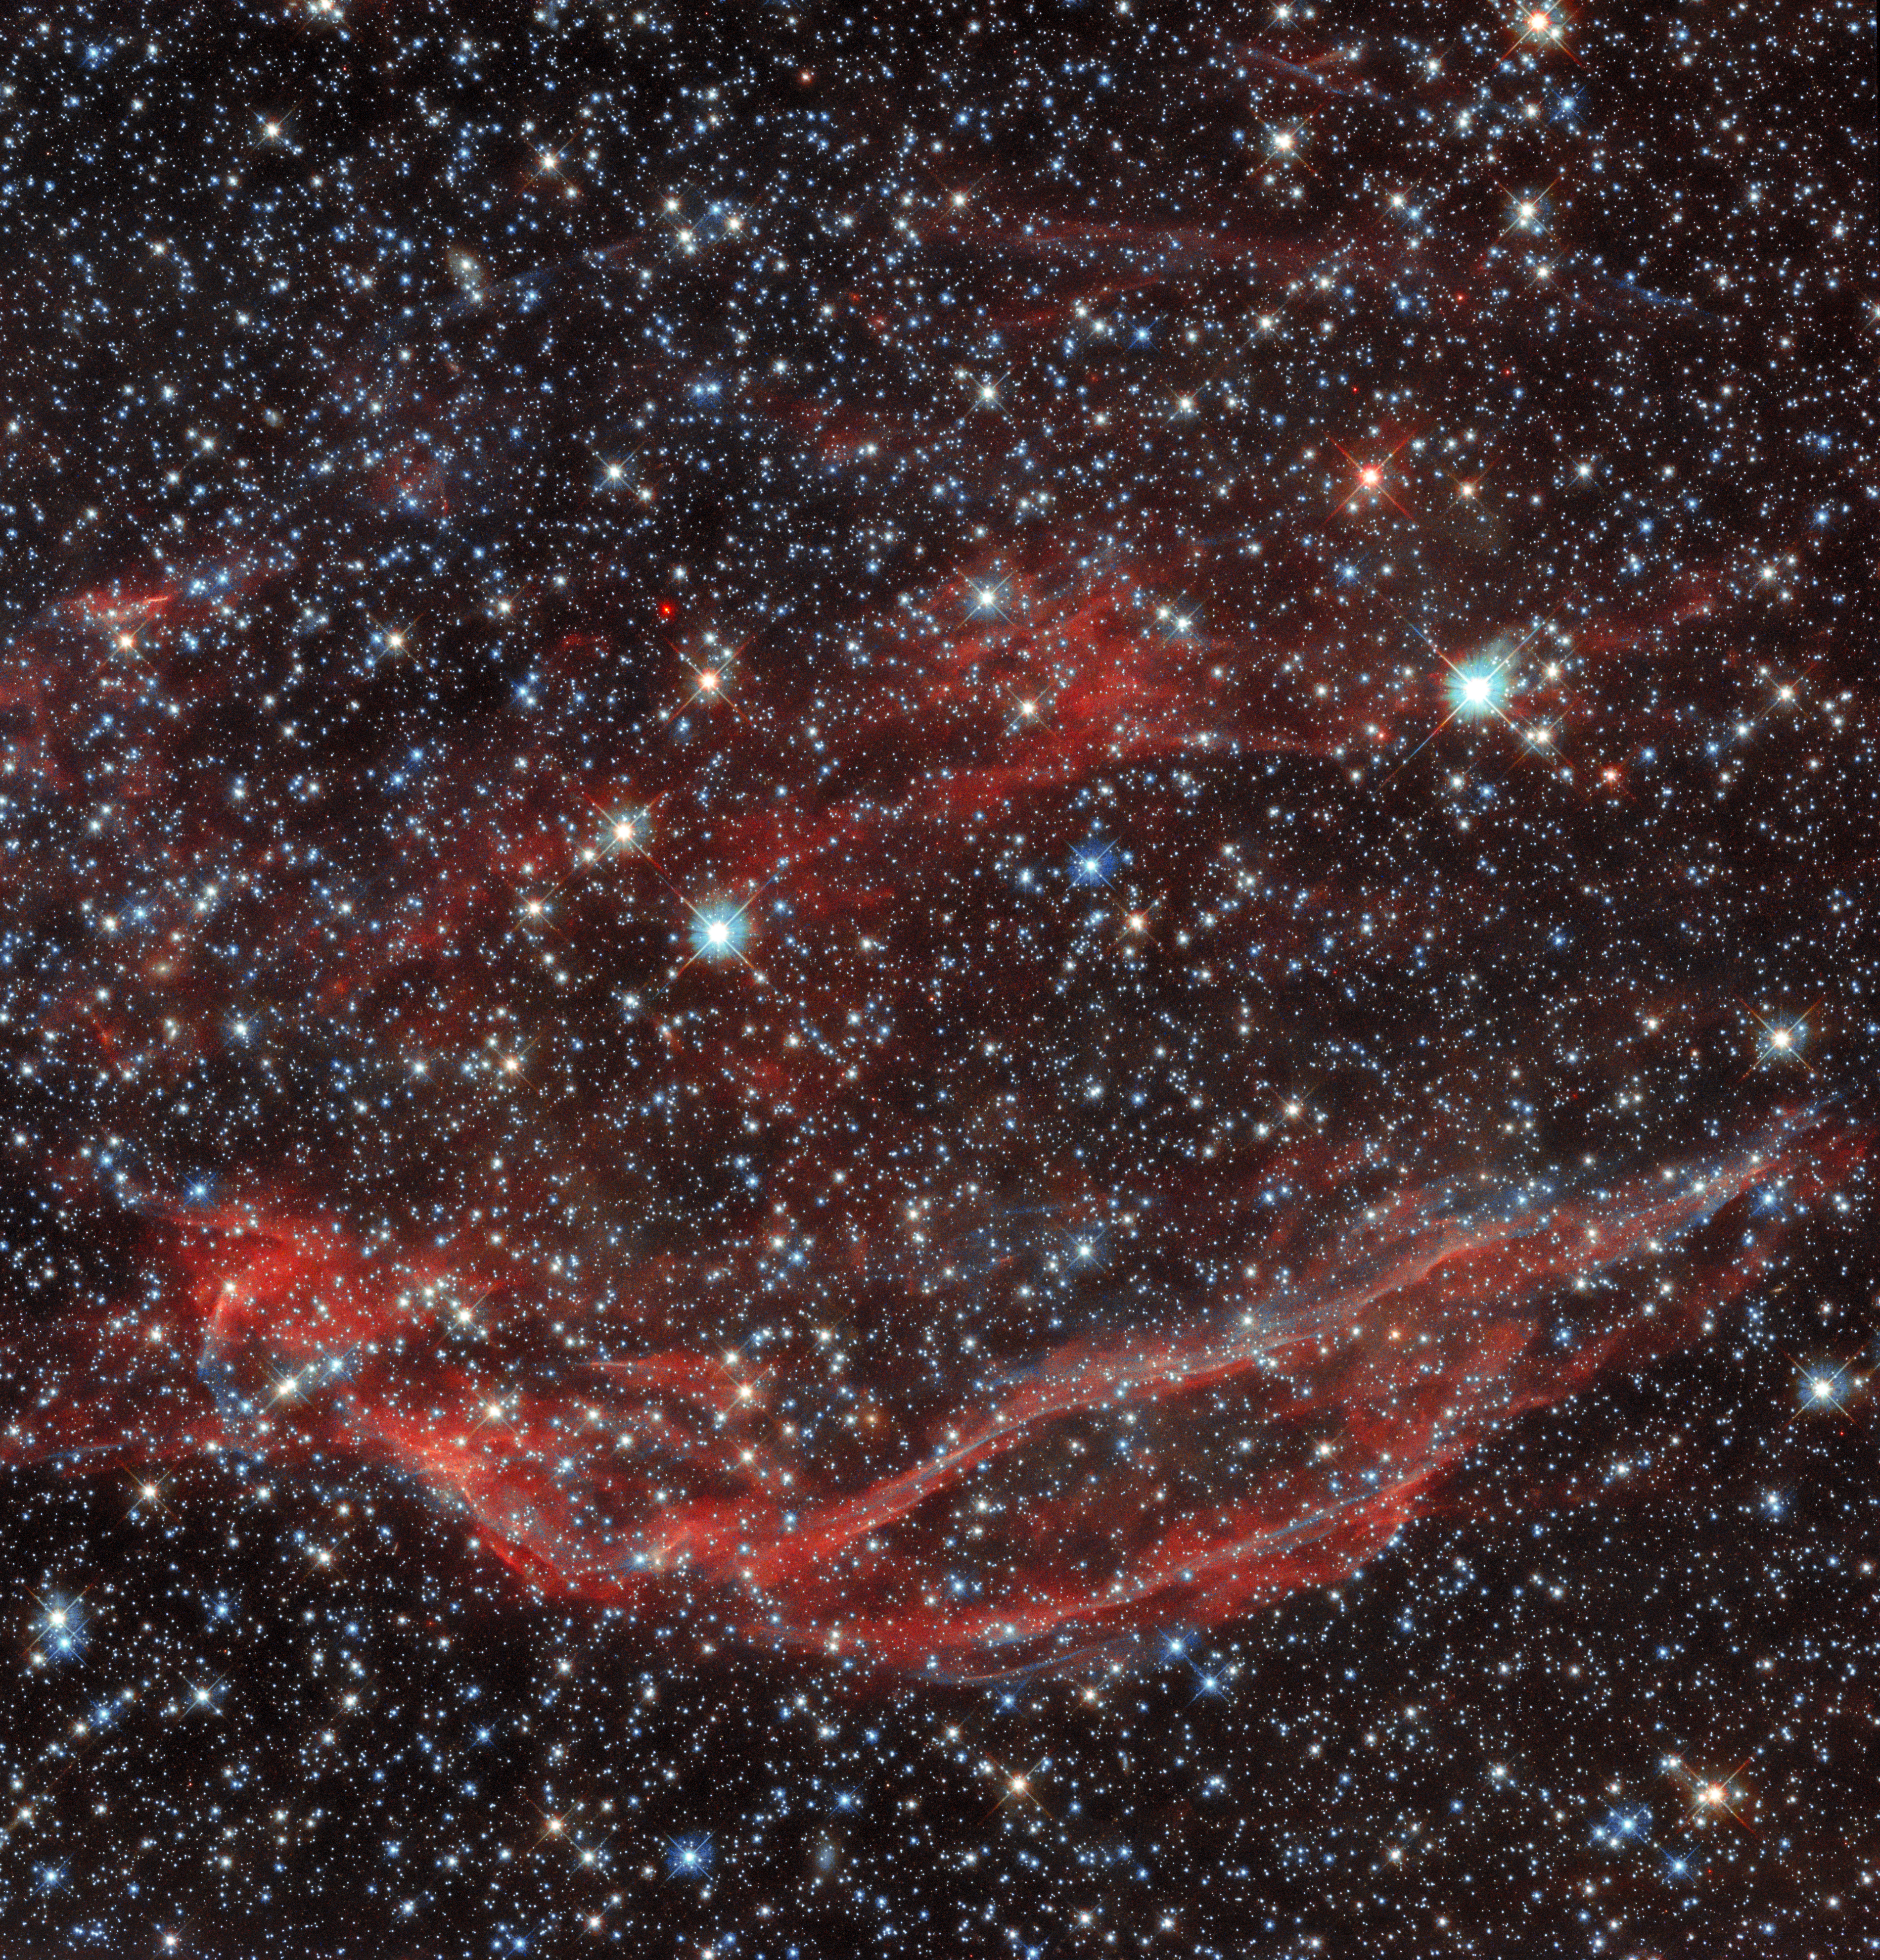

Aftermath of a Cosmic Cataclysm

This image from the NASA/ESA Hubble Space Telescope shows the tattered remnant of a supernova — a titanic explosion marking the end of the life of a dying star. This object — known as DEM L249 — is thought to have been created by a Type 1a supernova during the death throes of a white dwarf. While white dwarfs are usually stable, they can slowly accrue matter if they are part of a binary star system. This accretion of matter continues until the white dwarf reaches a critical mass and undergoes a catastrophic supernova explosion, ejecting a vast amount of material into space in the process.

DEM L249 lies in the constellation Mensa and is within the Large Magellanic Cloud (LMC), a small satellite galaxy of the Milky Way only 160 000 light-years from Earth. The LMC is an ideal natural laboratory where astronomers can study the births, lives, and deaths of stars, as this region is nearby, oriented towards Earth, and contains relatively little light-absorbing interstellar dust. The data in this image were gathered by Hubble’s Wide Field Camera 3 instrument, and were obtained during a systematic search of the LMC for the surviving companions of white dwarf stars which have gone supernova.

Credit: ESA/Hubble & NASA, Y. Chu